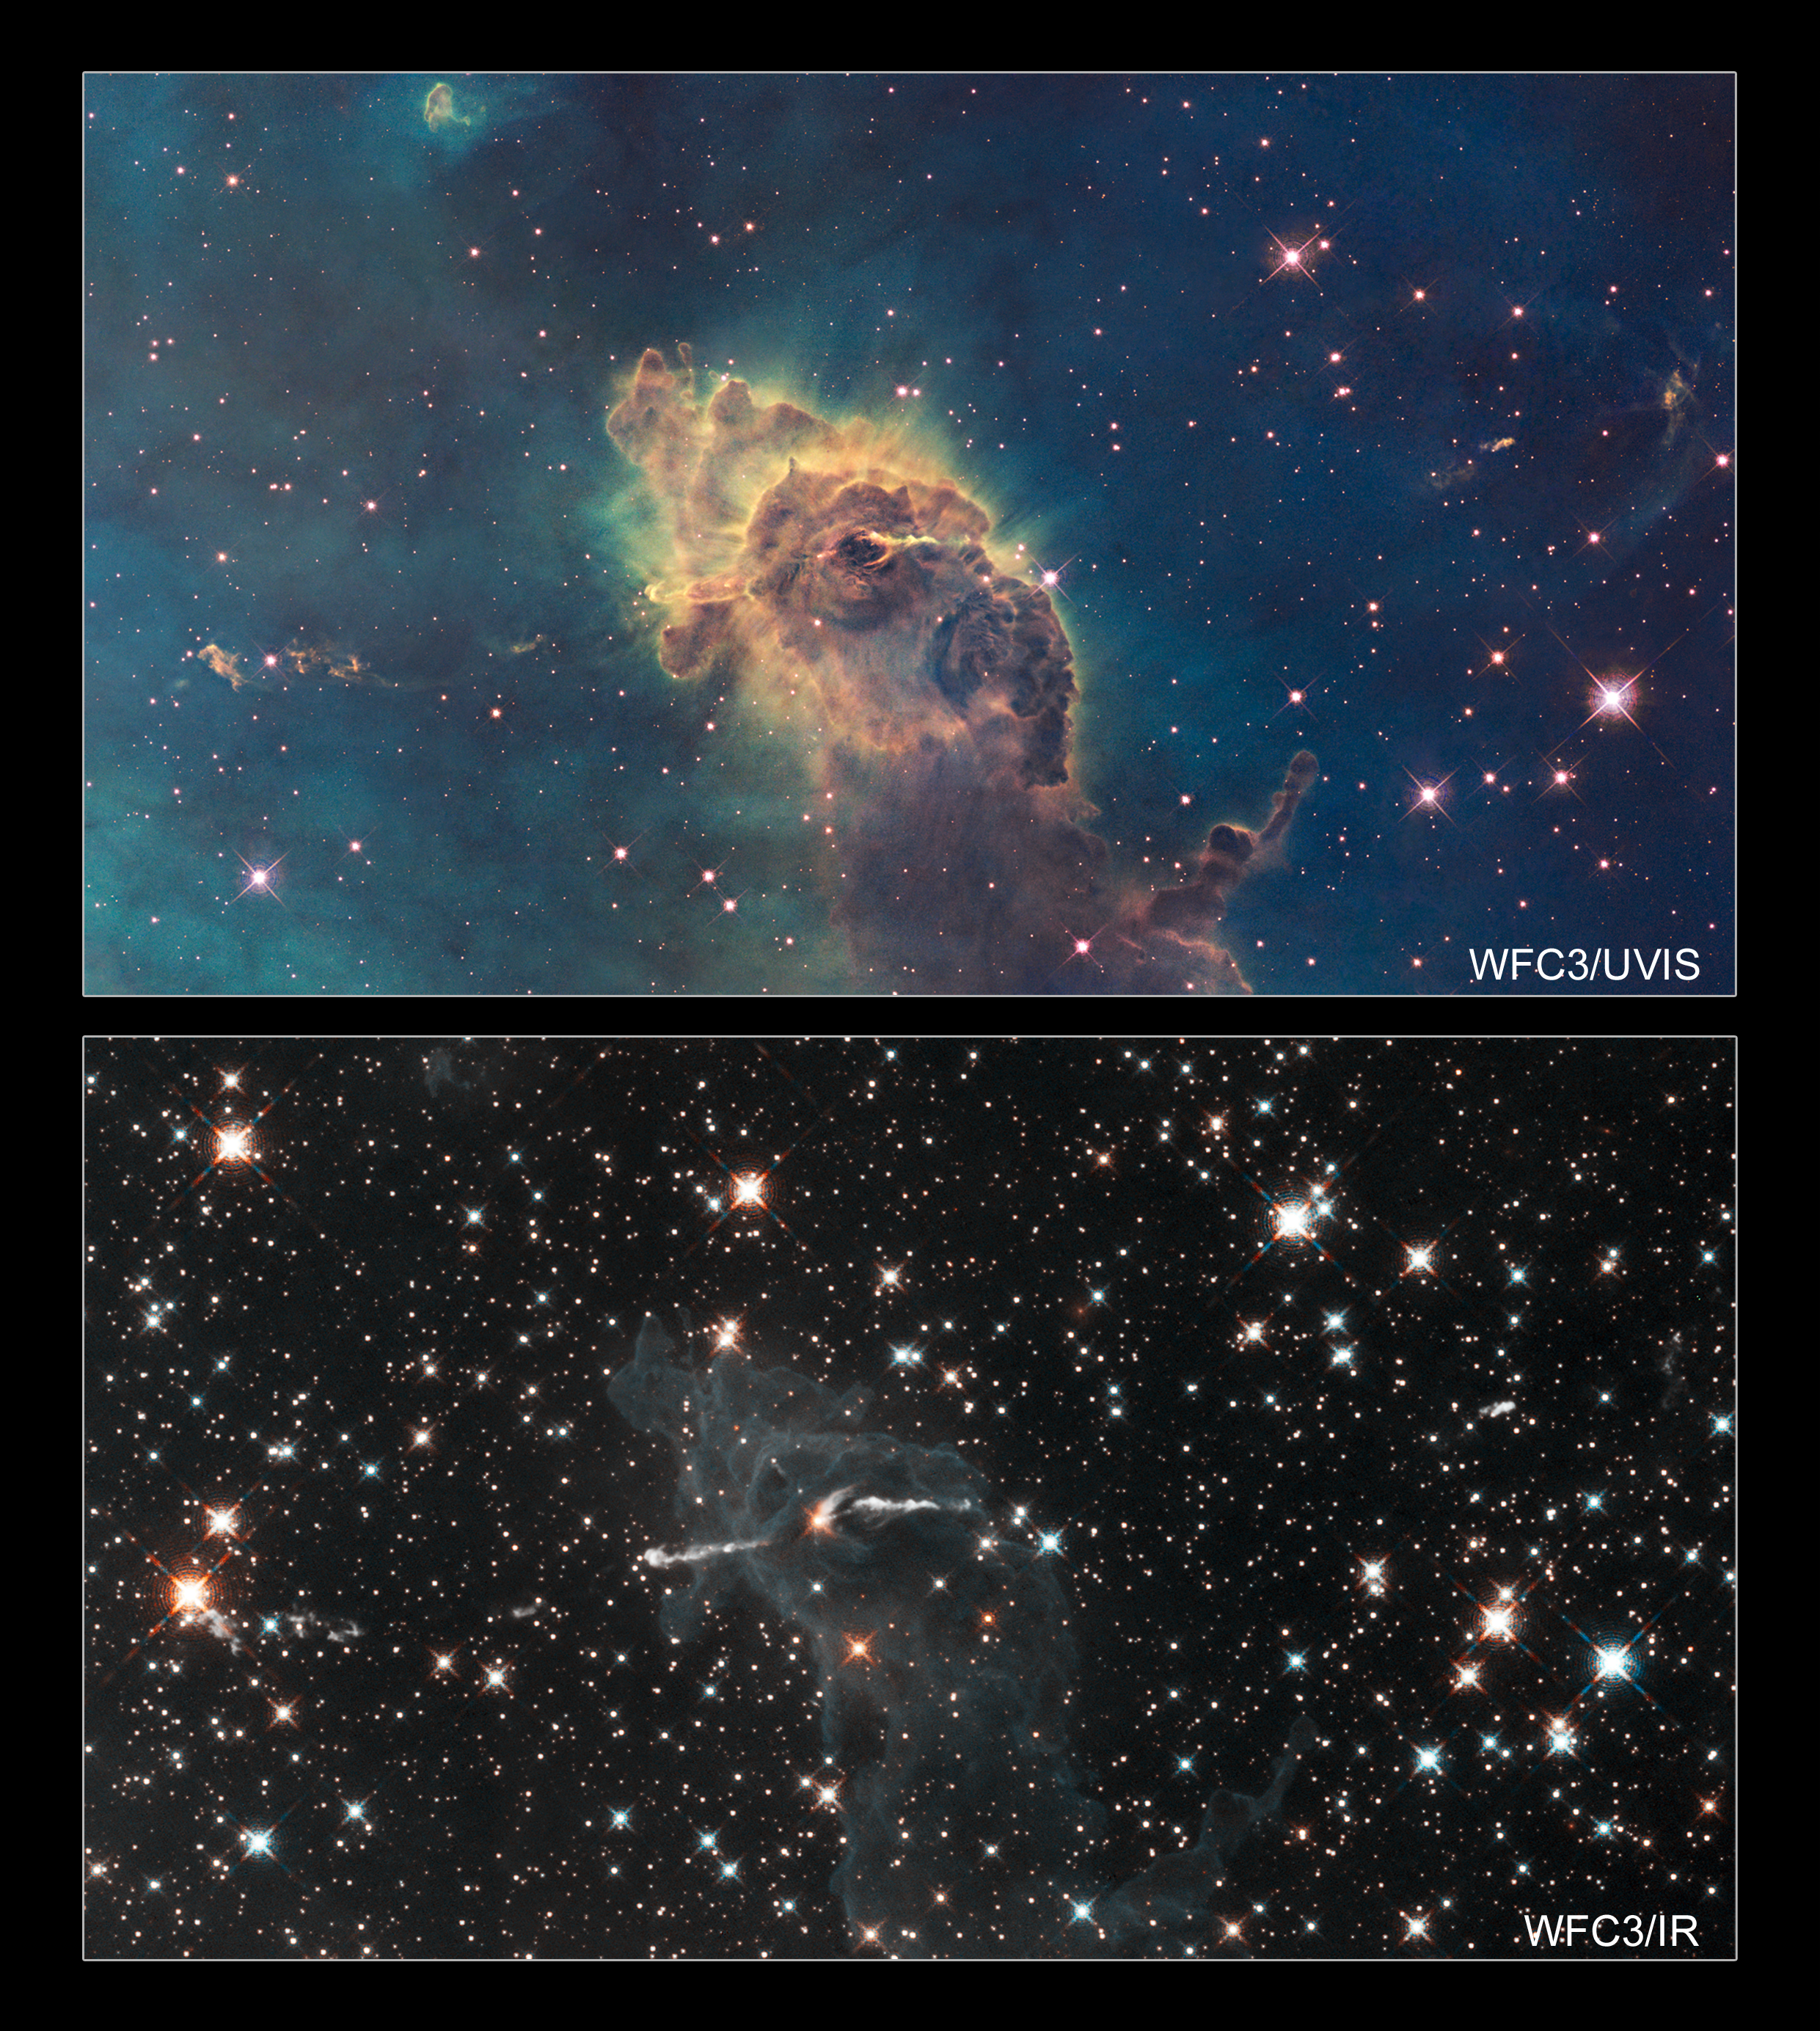

Stars bursting into life in the chaotic Carina Nebula

These two images of a huge pillar of star birth demonstrate how observations taken in visible and in infrared light by the NASA/ESA Hubble Space Telescope reveal dramatically different and complementary views of an object.

The pictures demonstrate one example of the broad wavelength range of the new Wide Field Camera 3 (WFC3) aboard the Hubble telescope, extending from ultraviolet to visible to infrared light.

Composed of gas and dust, the pillar resides in a tempestuous stellar nursery called the Carina Nebula, located 7500 light-years away in the southern constellation of Carina. The pair of images shows that astronomers are given a much more complete view of the pillar and its contents when distinct details not seen at visible wavelengths are uncovered in near-infrared light.

The top image, taken in visible light, shows the tip of the three-light-year-long pillar, bathed in the glow of light from hot, massive stars off the top of the image. Scorching radiation and fast winds (streams of charged particles) from these stars are sculpting the pillar and causing new stars to form within it. Streamers of gas and dust can be seen flowing off the top of the structure.

Nestled inside this dense structure are fledgling stars. They cannot be seen in this image because they are hidden by a wall of gas and dust. Although the stars themselves are invisible, one of them is providing evidence of its existence. Thin puffs of material can be seen travelling to the left and to the right of a dark notch in the centre of the pillar. The matter is part of a jet produced by a young star. Farther away, on the left, the jet is visible as a grouping of small, wispy clouds. A few small clouds are visible at a similar distance on the right side of the jet. Astronomers estimate that the jet is moving at speeds of over 1 300 000 kilometres per hour. The jet’s total length is about 10 light-years.

In the image at bottom, taken in near-infrared light, the dense column and the surrounding greenish-coloured gas all but disappear. Only a faint outline of the pillar remains. By penetrating the wall of gas and dust, the infrared vision of WFC3 reveals the infant star that is probably blasting the jet. Part of the jet nearest the star is more prominent in this view. These features can be seen because infrared light, unlike visible light, can pass through the dust.

Other infant stars inside the pillar also emerge. Three examples are the bright star almost directly below the jet-producing star, a fainter one to its right, and a pair of stars at the top of the pillar. Winds and radiation from some of the stars are blowing away gas from their neighbourhoods, carving out large cavities that appear as faint dark holes.

Surrounding the stellar nursery is a treasure chest full of stars, most of which cannot be seen in the visible-light image because dense gas clouds veil their light. Many of them are background stars.

Hubble's Wide Field Camera 3 observed the Carina Nebula on 24-30 July 2009. WFC3 was installed aboard Hubble in May 2009 during Servicing Mission 4. The composite image was made from filters that isolate emission from iron, magnesium, oxygen, hydrogen and sulphur.

These Hubble observations of the Carina Nebula are part of the Hubble Servicing Mission 4 Early Release Observations.

Credit: NASA, ESA and the Hubble SM4 ERO Team